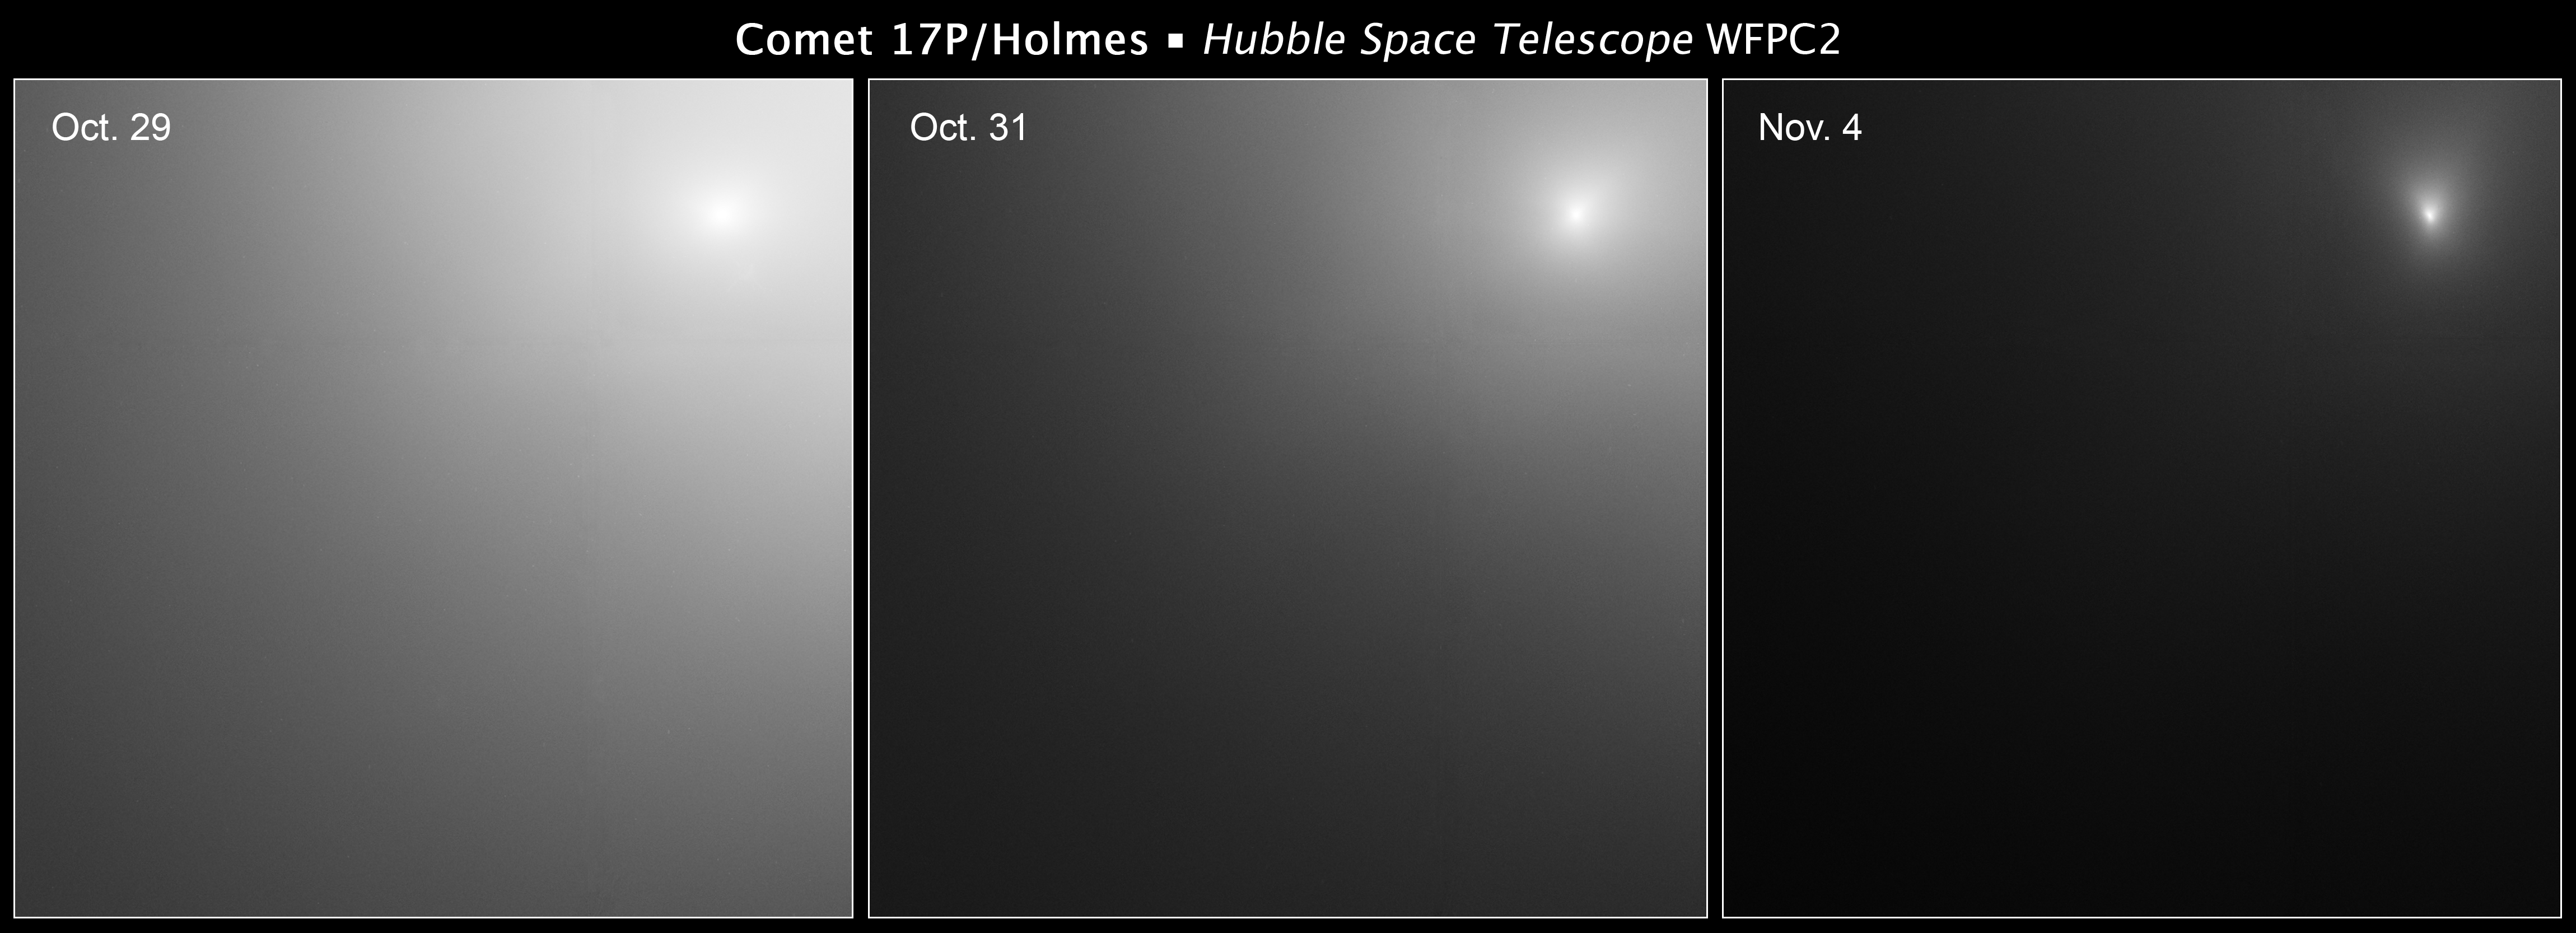

Comet 17P/Holmes Hubble image series

These images taken by the NASA/ESA Hubble Space Telescope reveal Comet Holmes's bright core. The images show that the coma, the cloud of dust and gas encircling the comet, is getting fainter over time. The coma was brightest in the 29 Oct. image. It is two times fainter on 31 Oct. and nine times dimmer on 4 Nov. than during the 29 Oct. observation.

The coma is getting fainter because it is expanding. A huge number of small dust particles were created during the 23 Oct. outburst. Since then those particles have been moving away from the nucleus and filling interplanetary space. The coma therefore is becoming more diffuse over time.

The nucleus, however, is still active and is producing a significant amount of new dust. So the region around the nucleus is still much brighter (at least 10 times brighter) than it usually is at this point in the comet's orbit.

Credit: NASA,ESA, and H. Weaver (The Johns Hopkins University Applied Physics Laboratory)